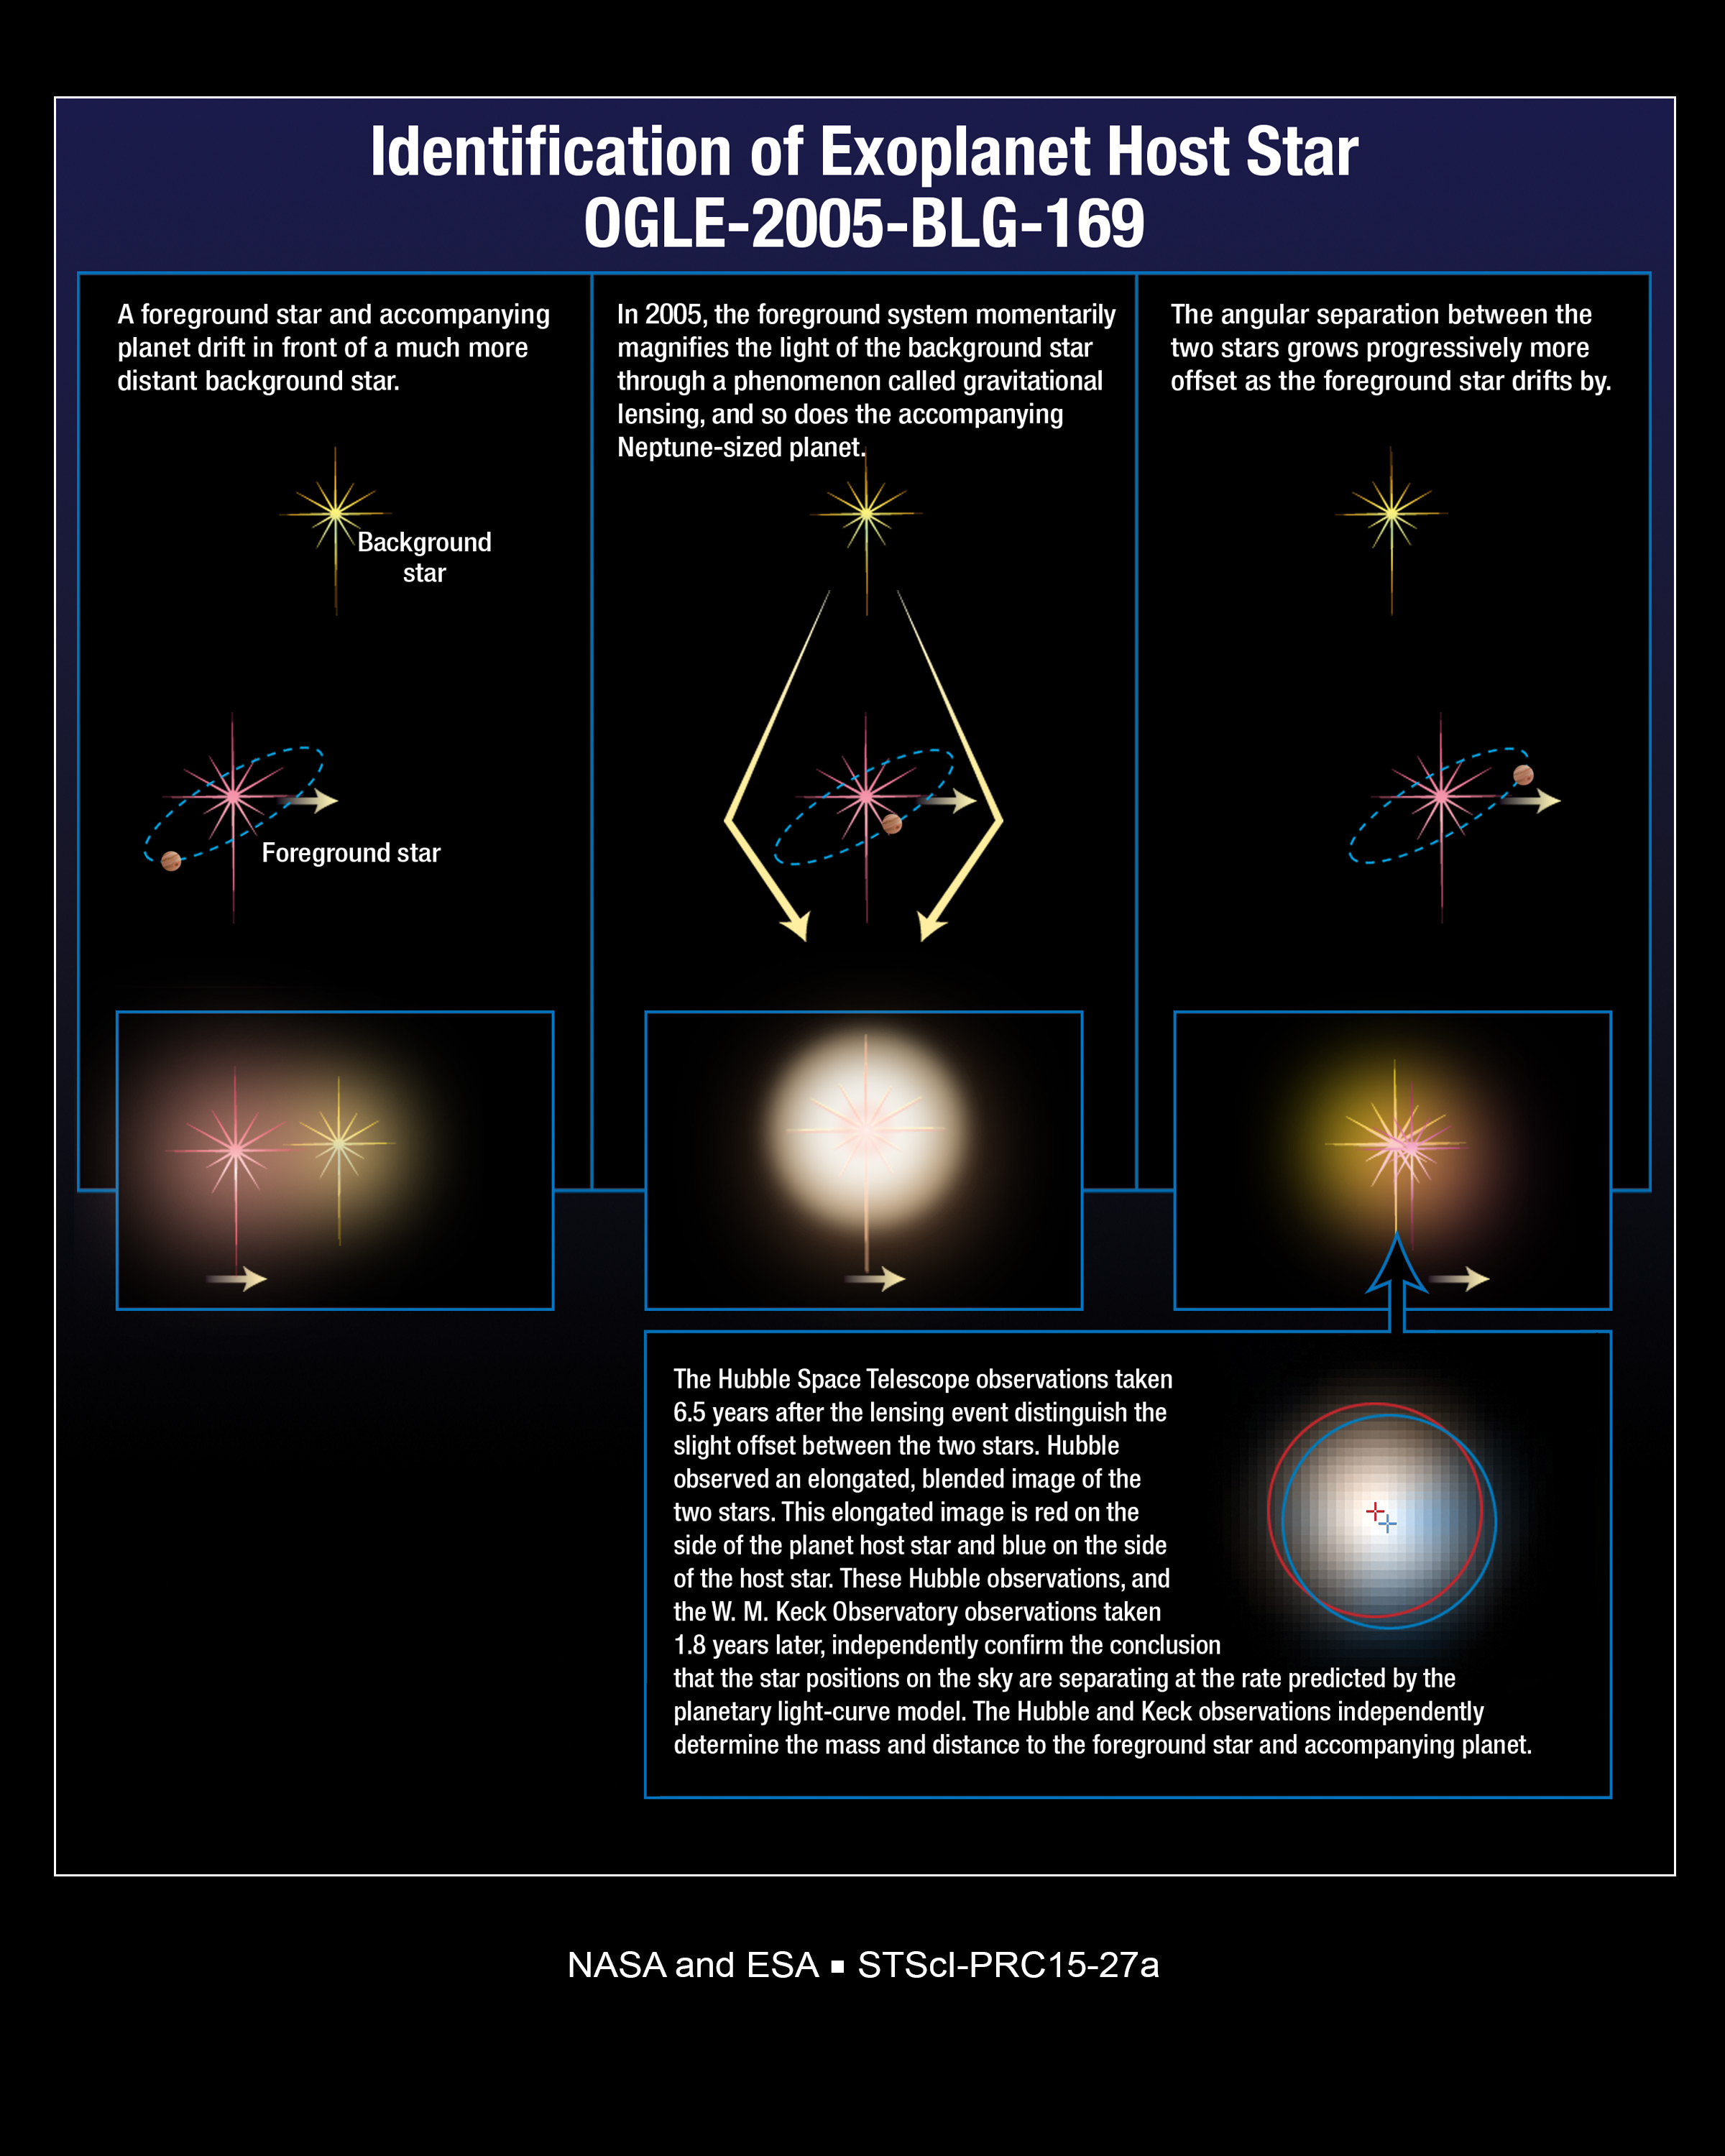

Identifying Planets

This graphic illustrates how a star can magnify and brighten the light of a background star when it passes in front of the distant star. If the foreground star has planets, then the planets may also magnify the light of the background star, but for a much shorter period of time than their host star. Astronomers use this method, called gravitational microlensing, to identify planets.

Credit: NASA, ESA, and A. Feild (STScI)